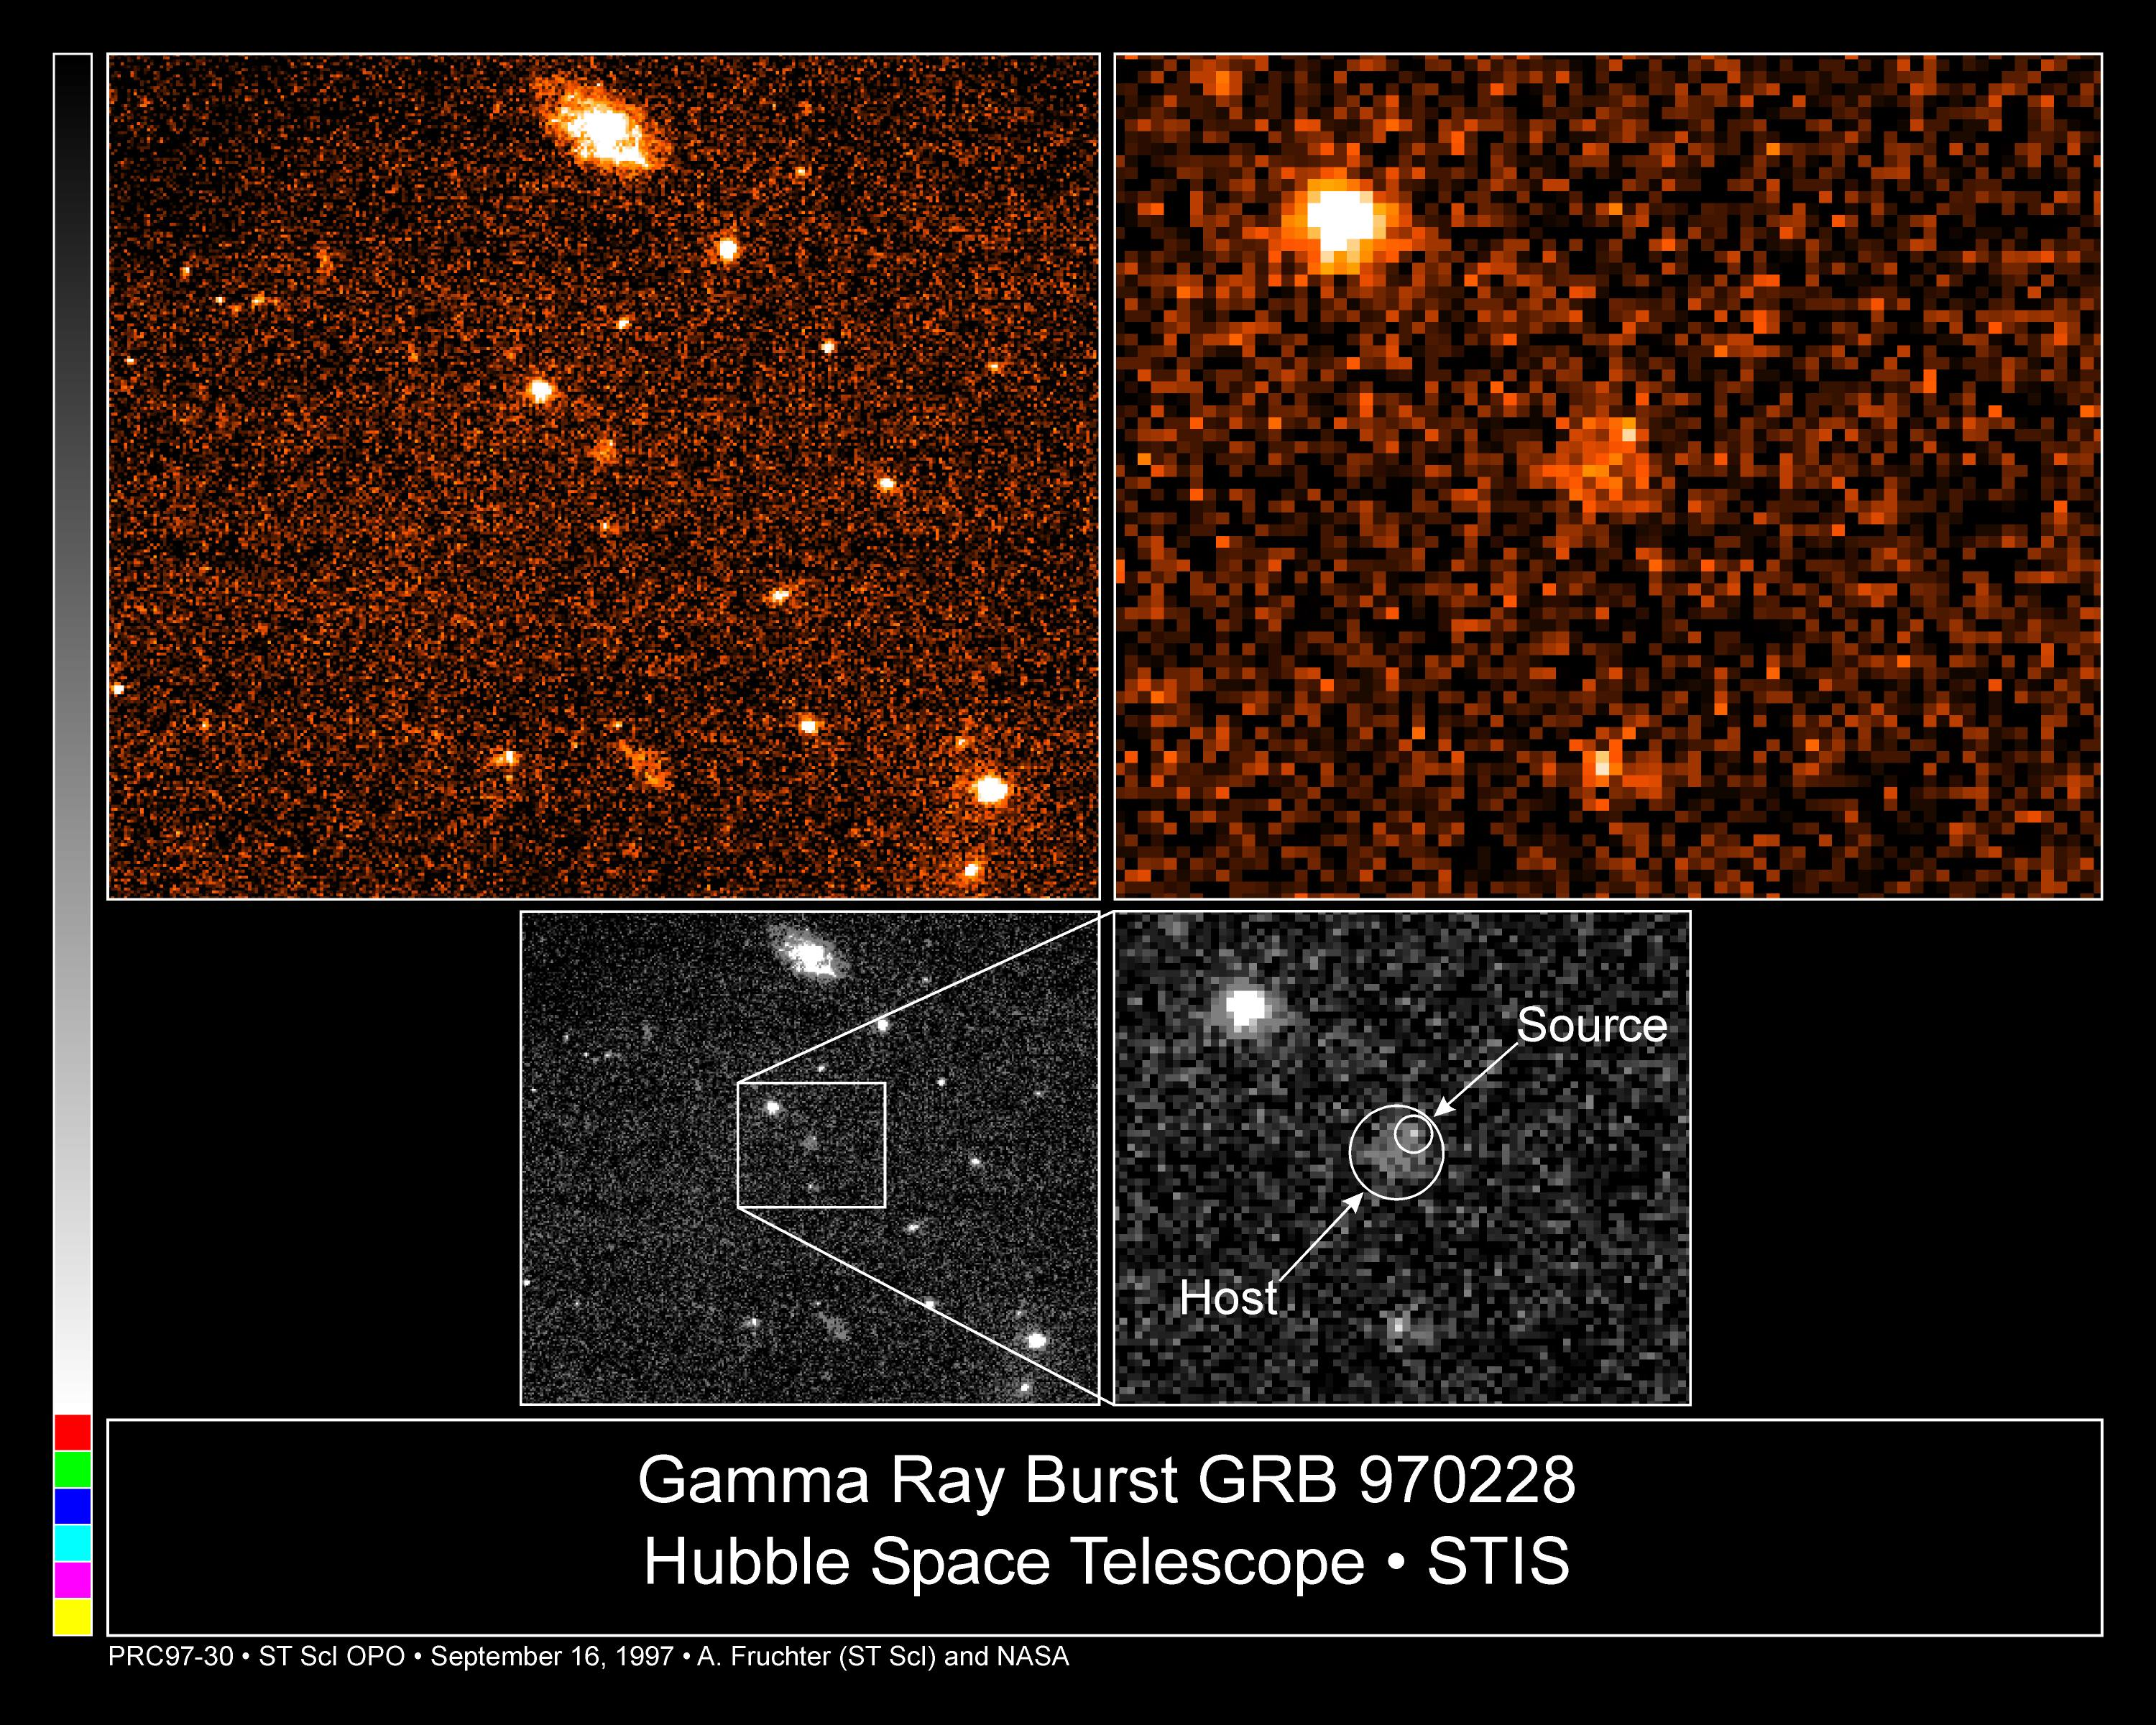

Gamma Ray Burst 970228

A Hubble Space Telescope image of the fading fireball from one of the universe's most mysterious phenomena, a gamma-ray burst.

Though the visible component has faded to 1/500th its brightness (27.7 magnitude) from the time it was first discovered by ground- based telescopes last March (the actual gamma-ray burst took place on February 28), Hubble continues to clearly see the fireball and discriminated a surrounding nebulosity (at 25th magnitude) which is considered a host galaxy.

Credit: Andrew Fruchter (STScI), Elena Pian (ITSRE-CNR), and NASA/ESA